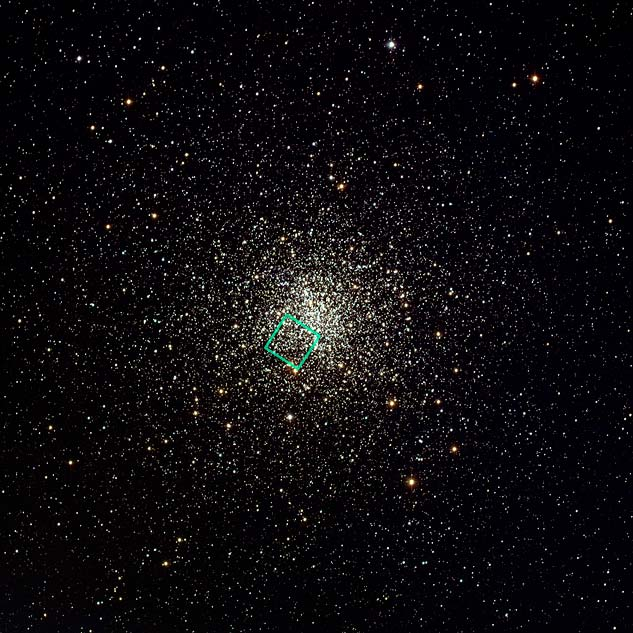

Globular cluster M4, NOAO

This sparkling picture taken by the NASA/ESA Hubble Space Telescope shows globular cluster M4. M4 is relatively close to us, lying 7200 light-years distant, making it a prime object for study. It contains several tens of thousand stars and is noteworthy in being home to many white dwarfs — the cores of ancient, dying stars whose outer layers have drifted away into space.

Credit: NOAO/AURA/NSF